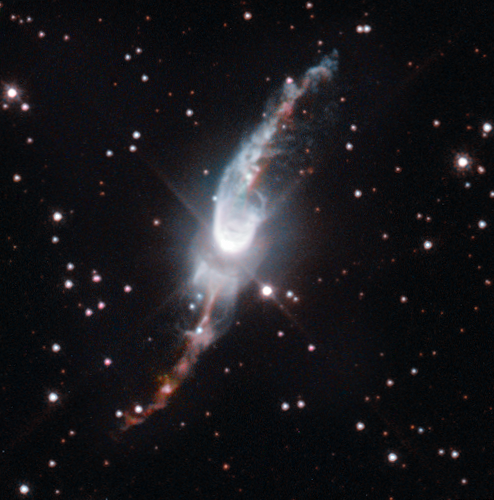

A cosmic garden sprinkler

The Universe is filled with mysterious objects. Many of them are as strange as they are beautiful. Among these, planetary nebulae are probably one of the most fascinating objects to behold in the night sky. No other type of object has such a large variety of shapes and structures. The NASA/ESA Hubble Space Telescope provides us this week with a striking image of Hen 3-1475, a planetary nebula in the making.

Planetary nebulae — the name arises because most of these objects resembled a planet when they were first discovered through early telescopes — are expanding, glowing shells of gas coming from Sun-like stars at the ends of their lives. They glow brightly because of the radiation that comes from a hot, compact core, which remains after the outer envelope is ejected, and is powerful enough to make these gossamer shells shine.

Each planetary nebula is complex and unique. Hen 3-1475 is a great example of a planetary nebula in the making, a phase which is known to astronomers as a protoplanetary or preplanetary nebula.

Since the central star has not yet blown away its complete shell, the star is not hot enough to ionise the shell of gas and so the nebula does not shine. Rather, we see the expelled gas thanks to light reflected off it. When the star’s envelope is fully ejected, it will begin to glow and become a planetary nebula.

Hen 3-1475 is located in the constellation of Sagittarius around 18 000 light-years away from us. The central star is more than 12 000 times as luminous as our Sun. Its most characteristic feature is a thick torus of dust around the central star and two S-shaped jets that are emerging from the pole regions of the central star. These jets are long outflows of fast-moving gas travelling at hundreds of kilometres per second.

The formation of these bipolar jets has puzzled astronomers for a long time. How can a spherical star form these complex structures? Recent studies suggest that the object’s characteristic shape and the large velocity outflow is created by a central source that ejects streams of gas in opposite directions and precesses once every thousand years. It is like an enormous, slowly rotating garden sprinkler in the middle of the sky. No wonder astronomers also have nicknamed this object the “Garden-sprinkler Nebula”.

This picture was taken with Hubble’s Wide Field Camera 3, which provides significantly higher resolution than previous observations made with the Wide Field and Planetary Camera 2 (heic0308).

Credit: ESA/Hubble & NASA